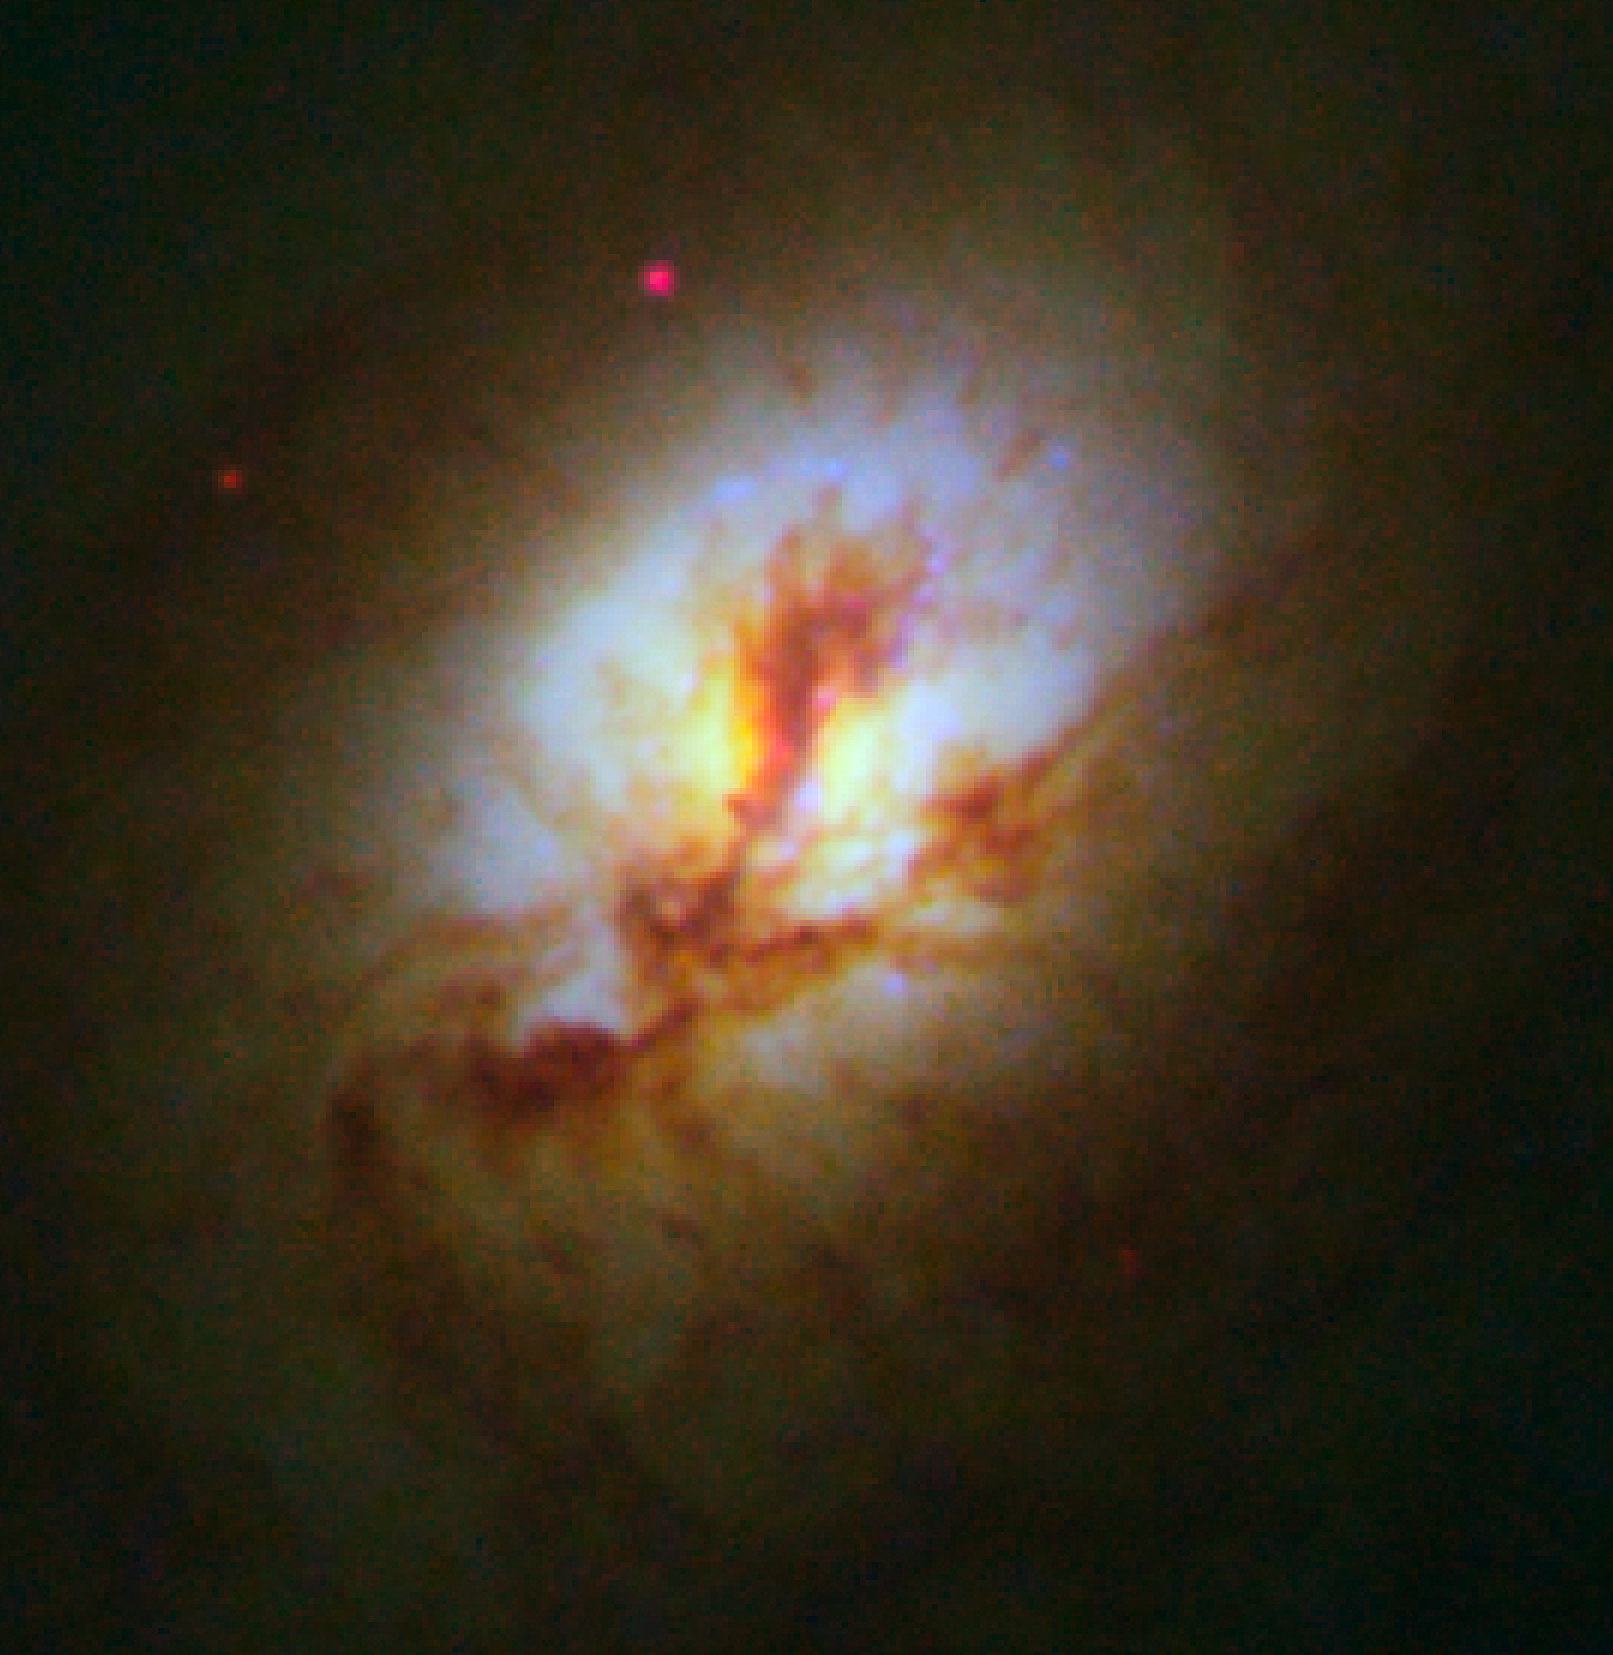

Core of elliptical galaxy NGC 4150

Core of elliptical galaxy NGC 4150 (detailed view).

Credit: NASA, ESA, R.M. Crockett (University of Oxford, U.K.), S. Kaviraj (Imperial College London and University of Oxford, U.K.), J. Silk (University of Oxford), M. Mutchler (Space Telescope Science Institute, Baltimore, USA), R. O'Connell (University of Virginia, Charlottesville, USA), and the WFC3 Scientific Oversight Committee